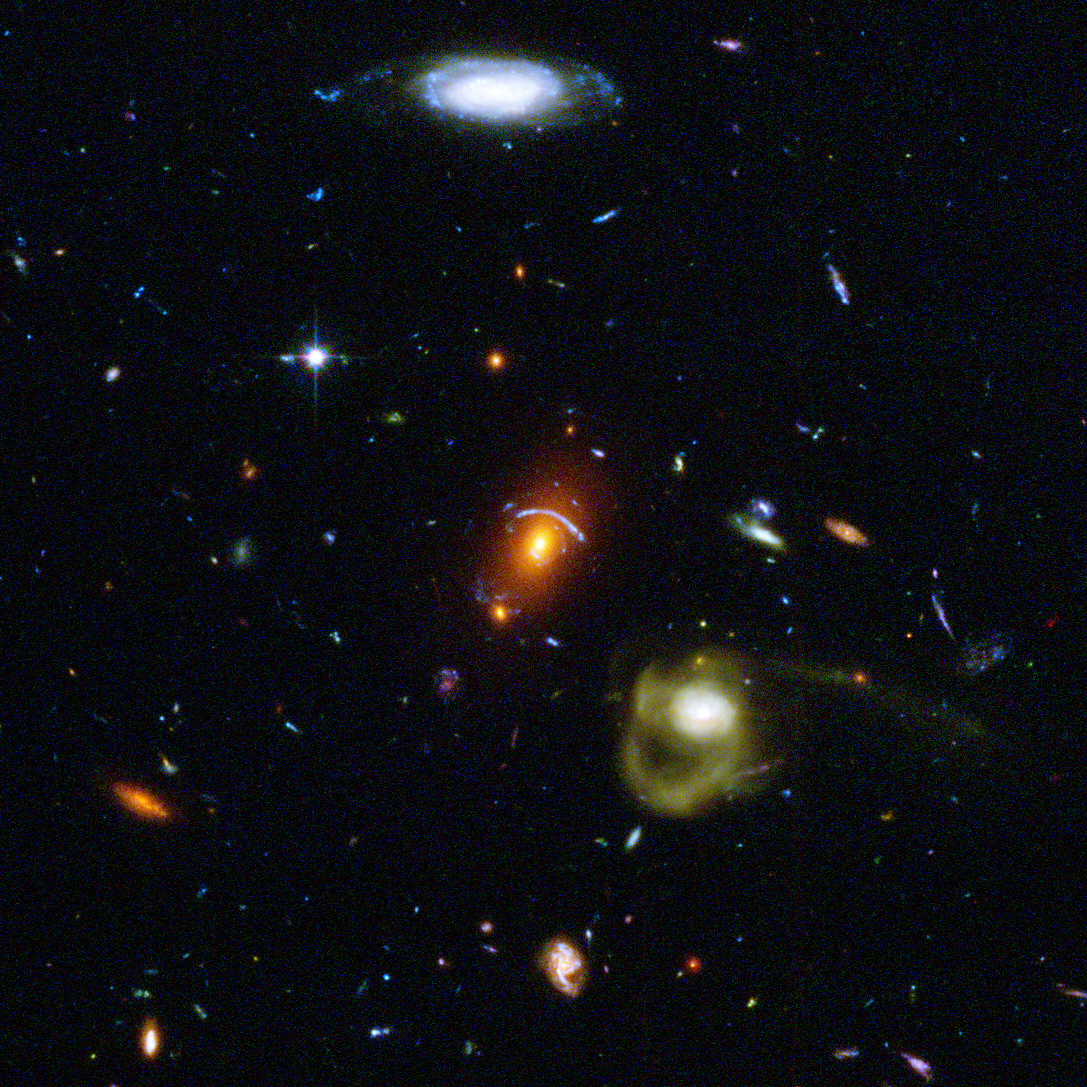

A Day in the Lives of Galaxies

Like a photographer clicking random snapshots of a crowd of people, NASA/ESA Hubble Space Telescope has taken a view of an eclectic mix of galaxies. In taking this picture, Hubble's Advanced Camera for Surveys was not looking at any particular target. The camera was taking a picture of a typical patch of sky, while Hubble's infrared camera was viewing a target in an adjacent galaxy-rich region.

Credit: NASA, ESA, J. Blakeslee and H. Ford (Johns Hopkins University)